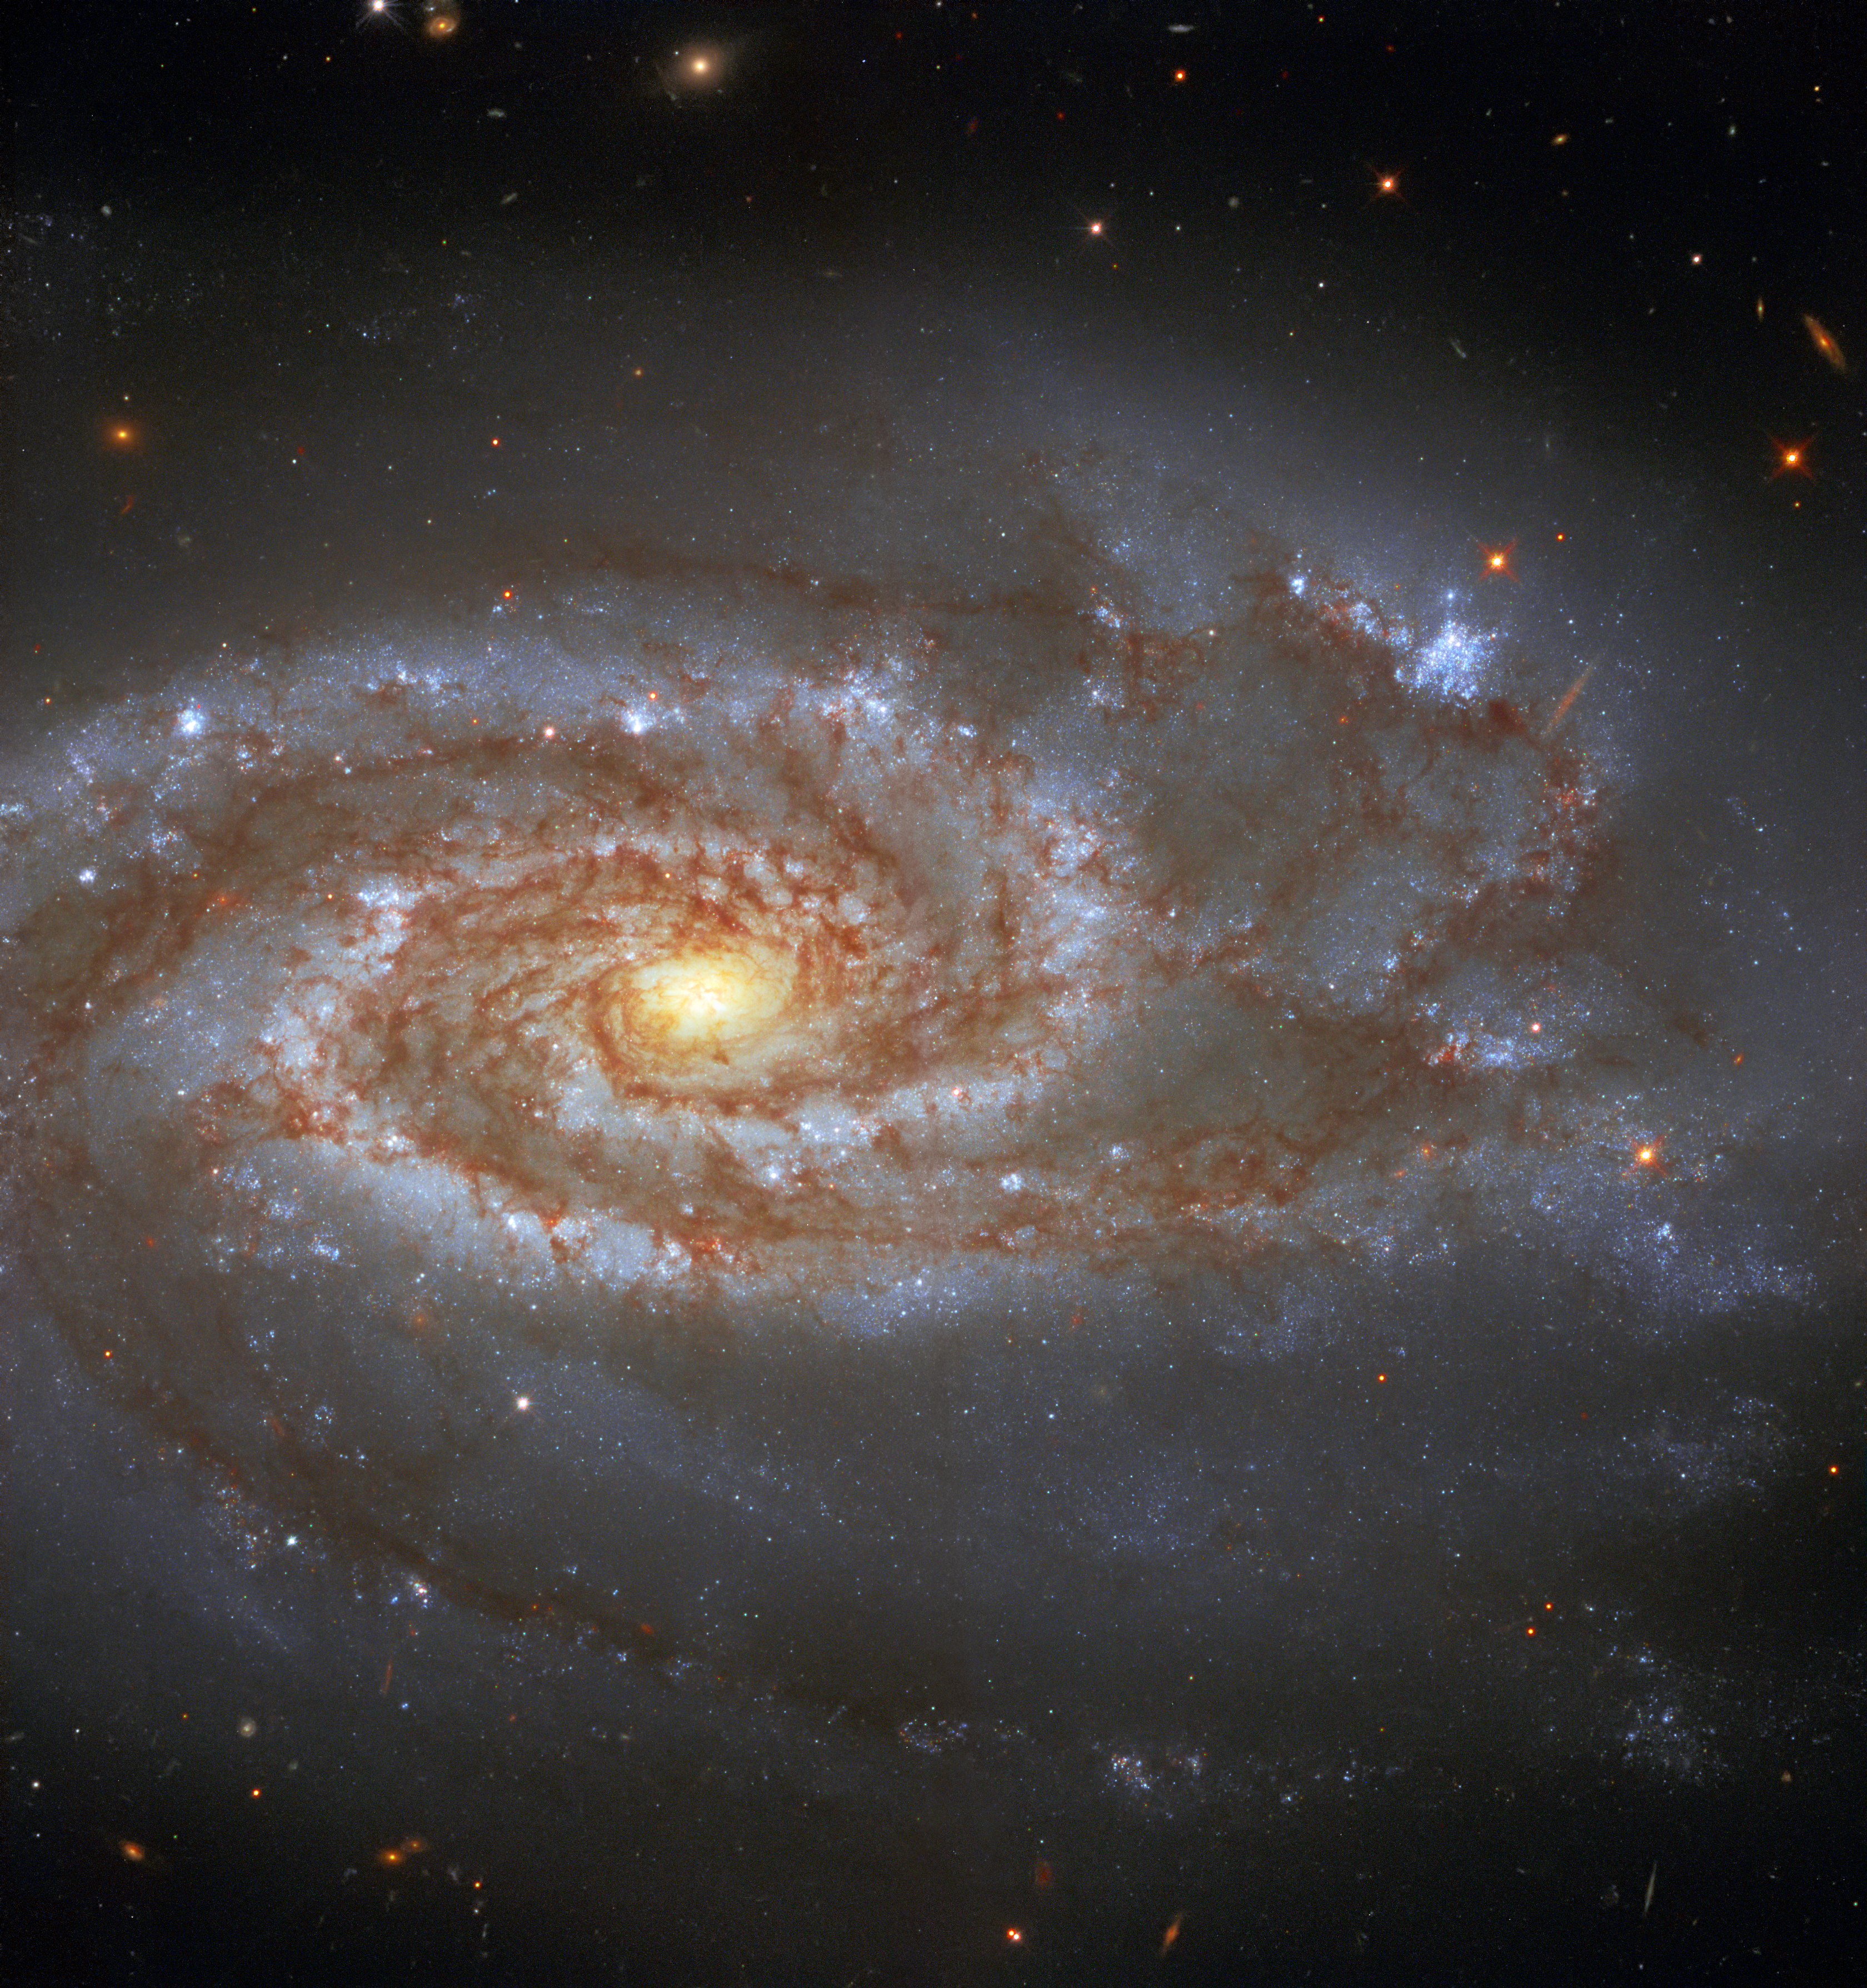

Two Supernovae, One Galaxy

Approximately 85 million light-years from Earth, in the constellation of Libra, is the beautiful galaxy NGC 5861, captured here by the NASA/ESA Hubble Space Telescope.

NGC 5861 is an intermediate spiral galaxy. Astronomers classify most galaxies by their morphology. For example, the Milky Way galaxy is a barred spiral galaxy. An intermediate spiral galaxy has a shape lying in between that of a barred spiral galaxy, one that appears to have a central bar-shaped structure, and that of an unbarred spiral galaxy, one without a central bar.

Two supernovae, SN1971D and SN2017erp, have been observed in the galaxy. Supernovae are powerful and luminous explosions that can light up the night sky. The brightest supernova ever recorded was possibly SN 1006. It shone 16 times as bright as Venus from April 30 to May 1, 1006 AD.

Credit: ESA/Hubble & NASA, A. Riess et al.